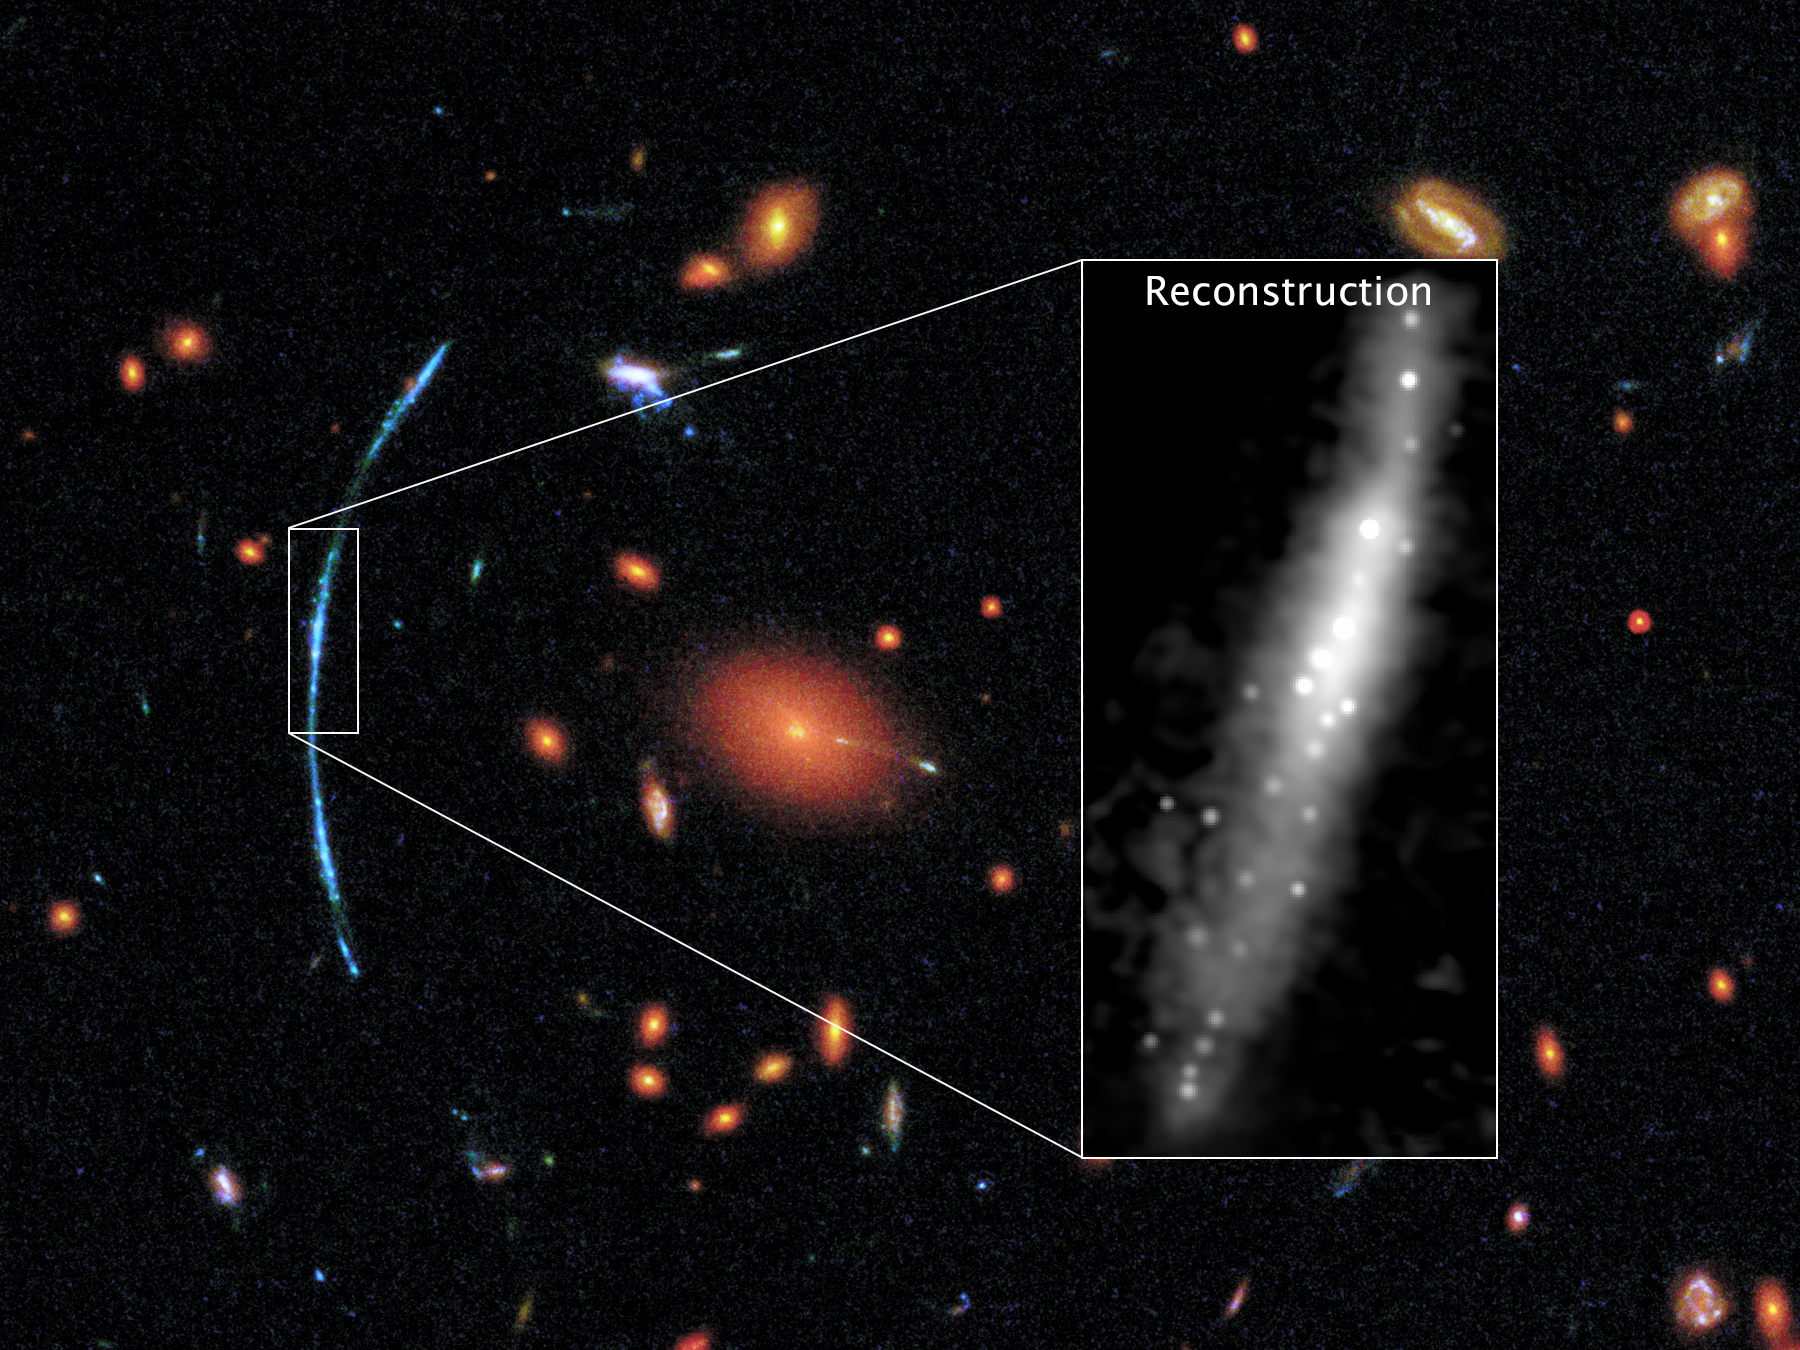

Hubble pushed beyond limits to spot clumps of new stars in distant galaxy

In this Hubble image of a distant galaxy cluster, a spotty blue arc stands out dramatically against a background of red galaxies. That arc is actually three separate images of the same background galaxy. The background galaxy has been gravitationally lensed, its light magnified and distorted by the intervening galaxy cluster.

By using the magnifying power of this natural cosmic lens, astronomers have been able to study the background galaxy in intimate detail. Through sophisticated computer processing, they determined how the galaxy’s image has been warped by gravity. The image at right shows how the galaxy would look to Hubble without distortions.

It reveals a disc galaxy containing clumps of star formation that each span about 200 to 300 light-years. This contradicts theories suggesting that star-forming regions in the distant, early Universe were much larger, 3000 light-years or more in size.

Credit: NASA, ESA, and T. Johnson (University of Michigan)